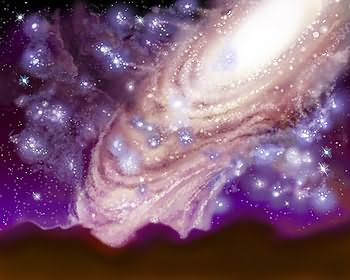

Milky Way/Andromeda collision (artist's impression)

The Hubble telescope has uncovered over 1,000 bright; young star clusters bursting to life in a brief, intense, brilliant "fireworks show" at the heart of a pair of colliding galaxies. This artist's impression shows what it may look like when the Milky Way and Andromeda collide.

Credit: James Gitlin